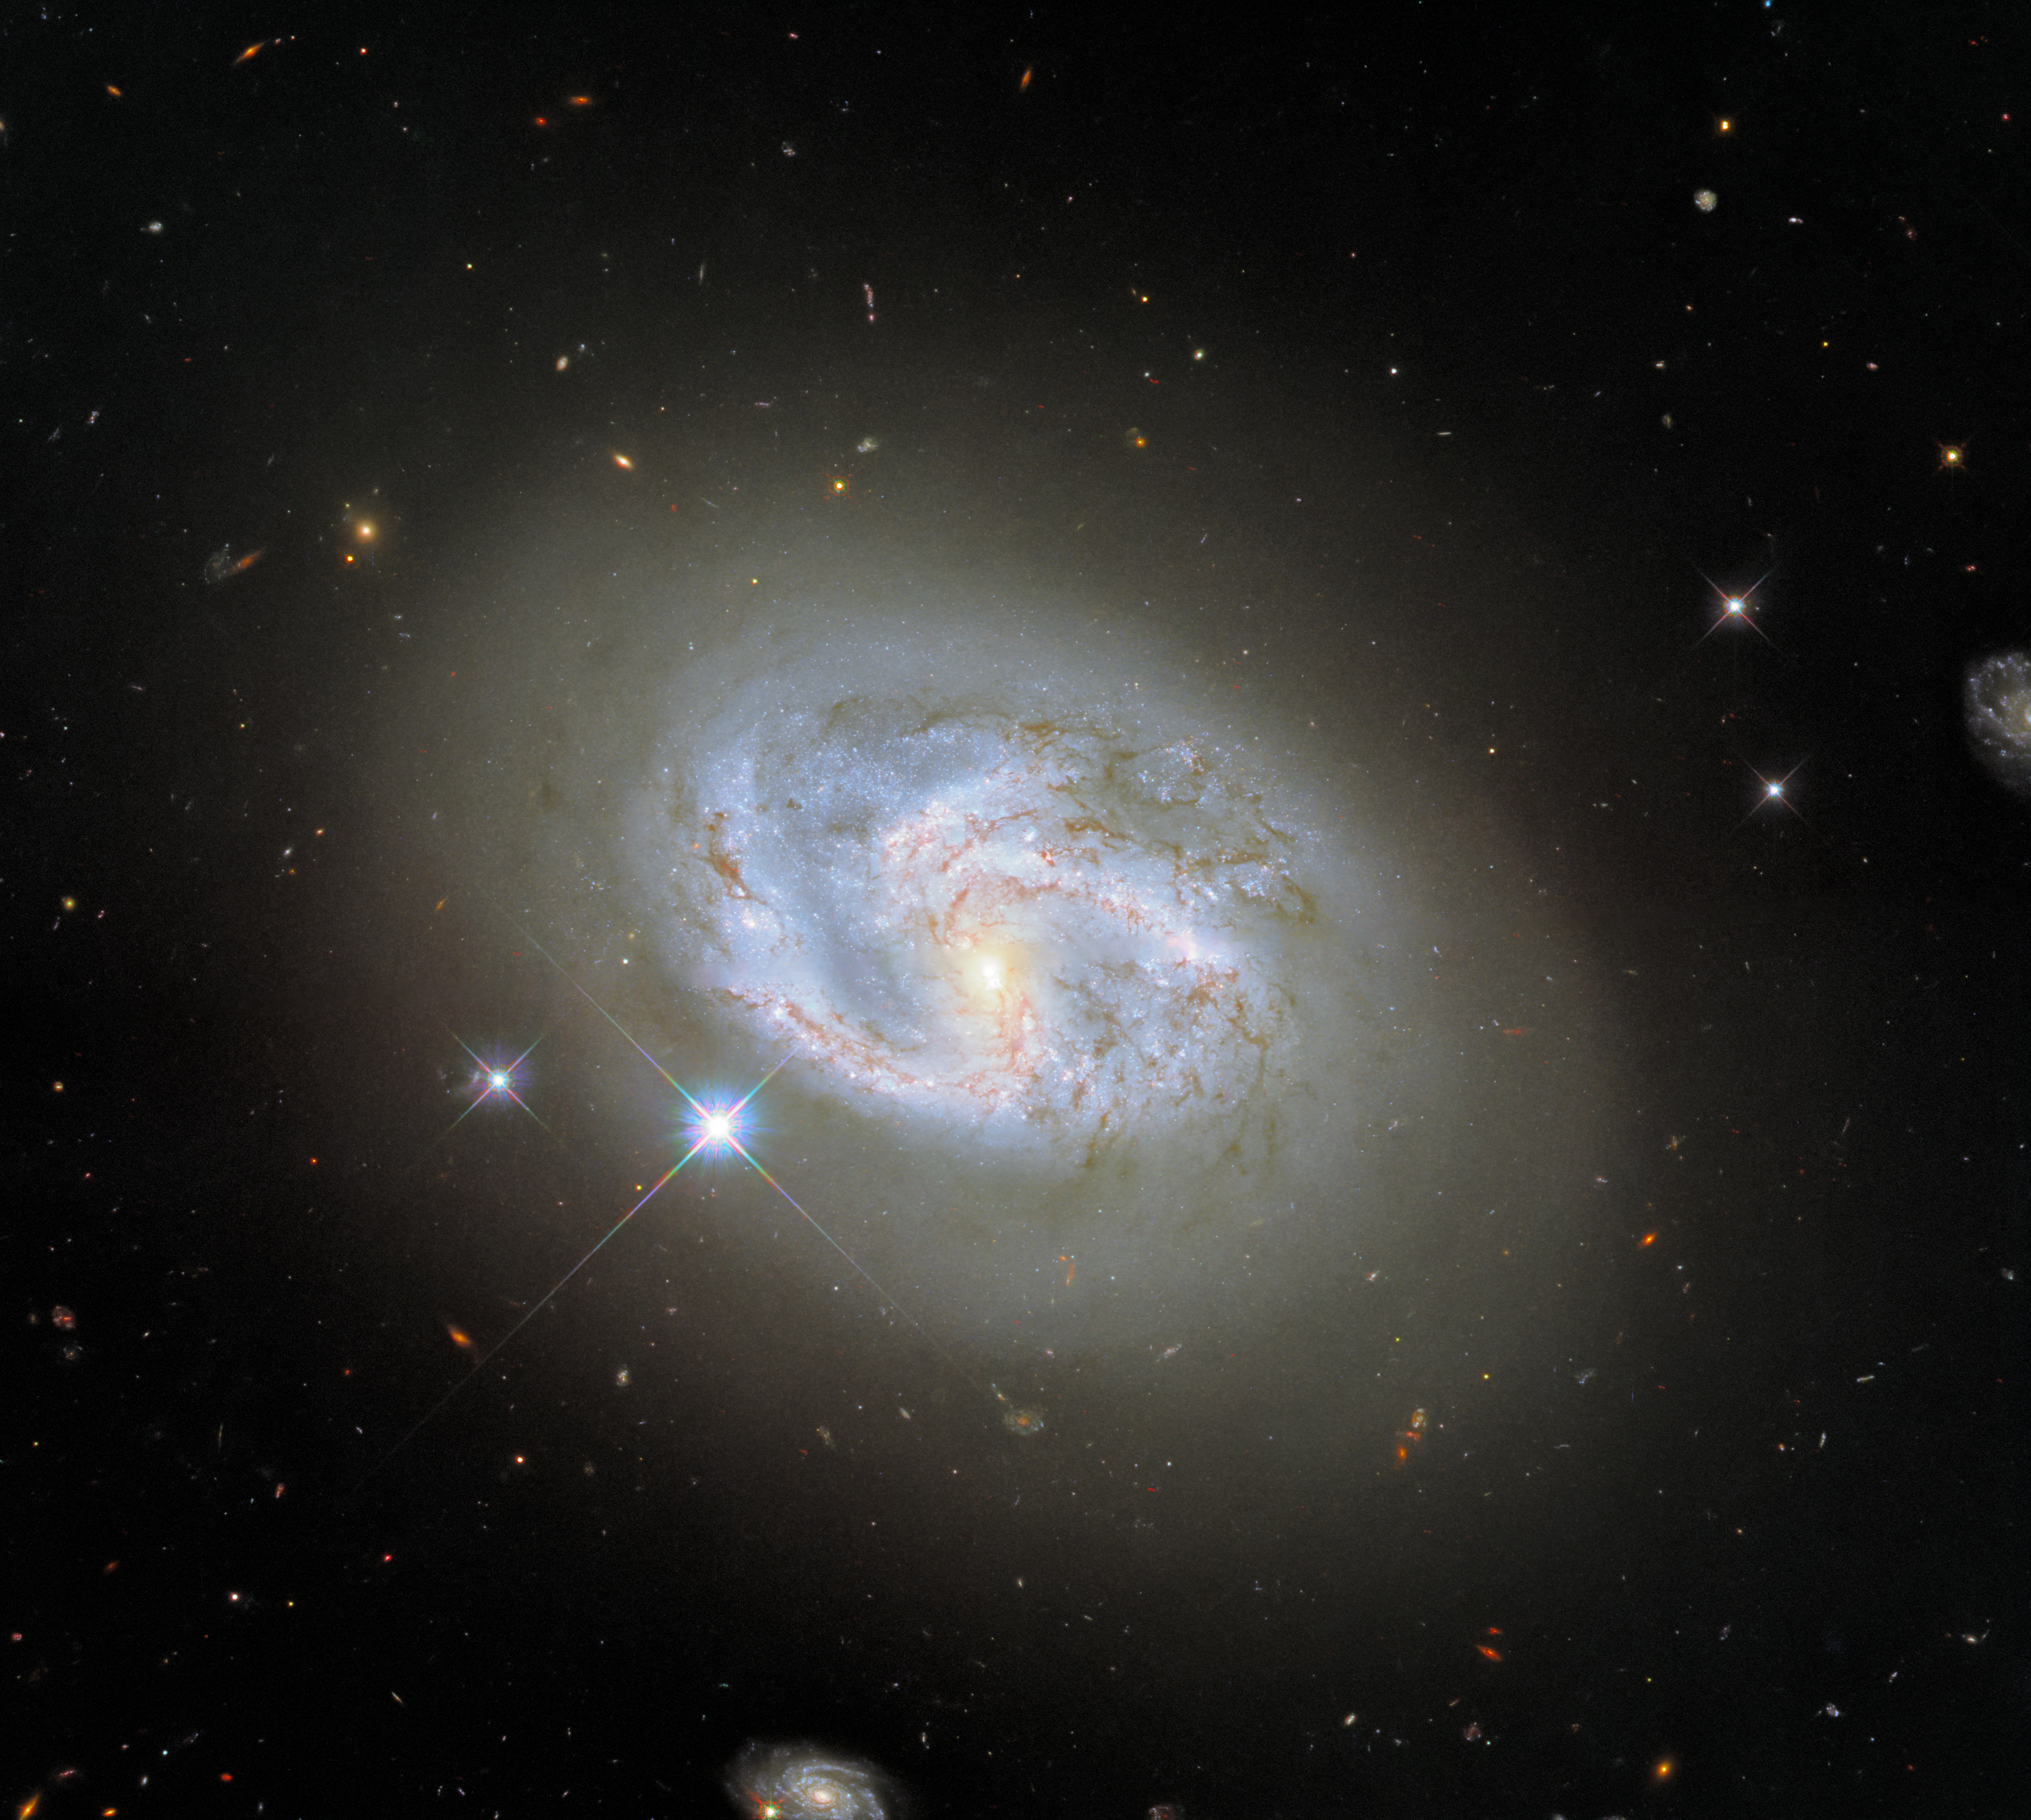

A Spiral Amongst Friends

This image, taken with Hubble’s Wide Field Camera 3 (WFC3), features the spiral galaxy NGC 4680. At 2 o’clock and 7 o’clock two other galaxies can be seen flanking NGC 4680. NGC 4680 enjoyed a wave of attention in 1997, as it played host to a supernova explosion known as SN 1997bp. Amazingly, the supernova was identified by an Australian amateur astronomer named Robert Evans, who has identified an extraordinary 42 supernova explosions.

NGC 4680 is actually a rather tricky galaxy to classify. It is sometimes referred to as a spiral galaxy, but it is also sometimes classified as a lenticular galaxy. Lenticular galaxies fall somewhere in between spiral galaxies and elliptical galaxies. Whilst NGC 4680 does have distinguishable spiral arms, they are not clearly defined, and the tip of one arm appears very diffuse. Galaxies are not static, and their morphologies (and therefore their classifications) vary throughout their lifetimes. Spiral galaxies are thought to evolve into elliptical galaxies, most likely by merging with one another, causing them to lose their distinctive spiral structures.

Credit: ESA/Hubble & NASA, A. Riess et al.